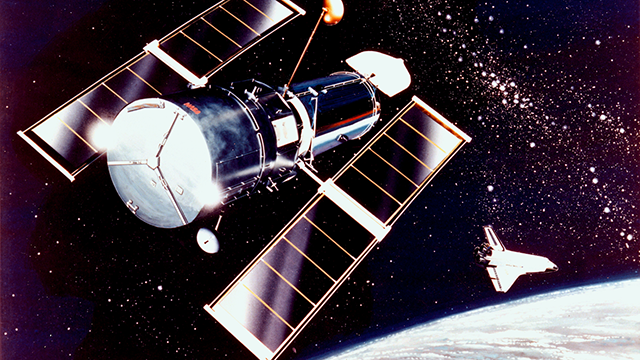

Screenshot of Hubblecast 41

Watch the Hubblecast 41 on: http://www.spacetelescope.org/videos/hubblecast41a/

Credit: NASA and ESA